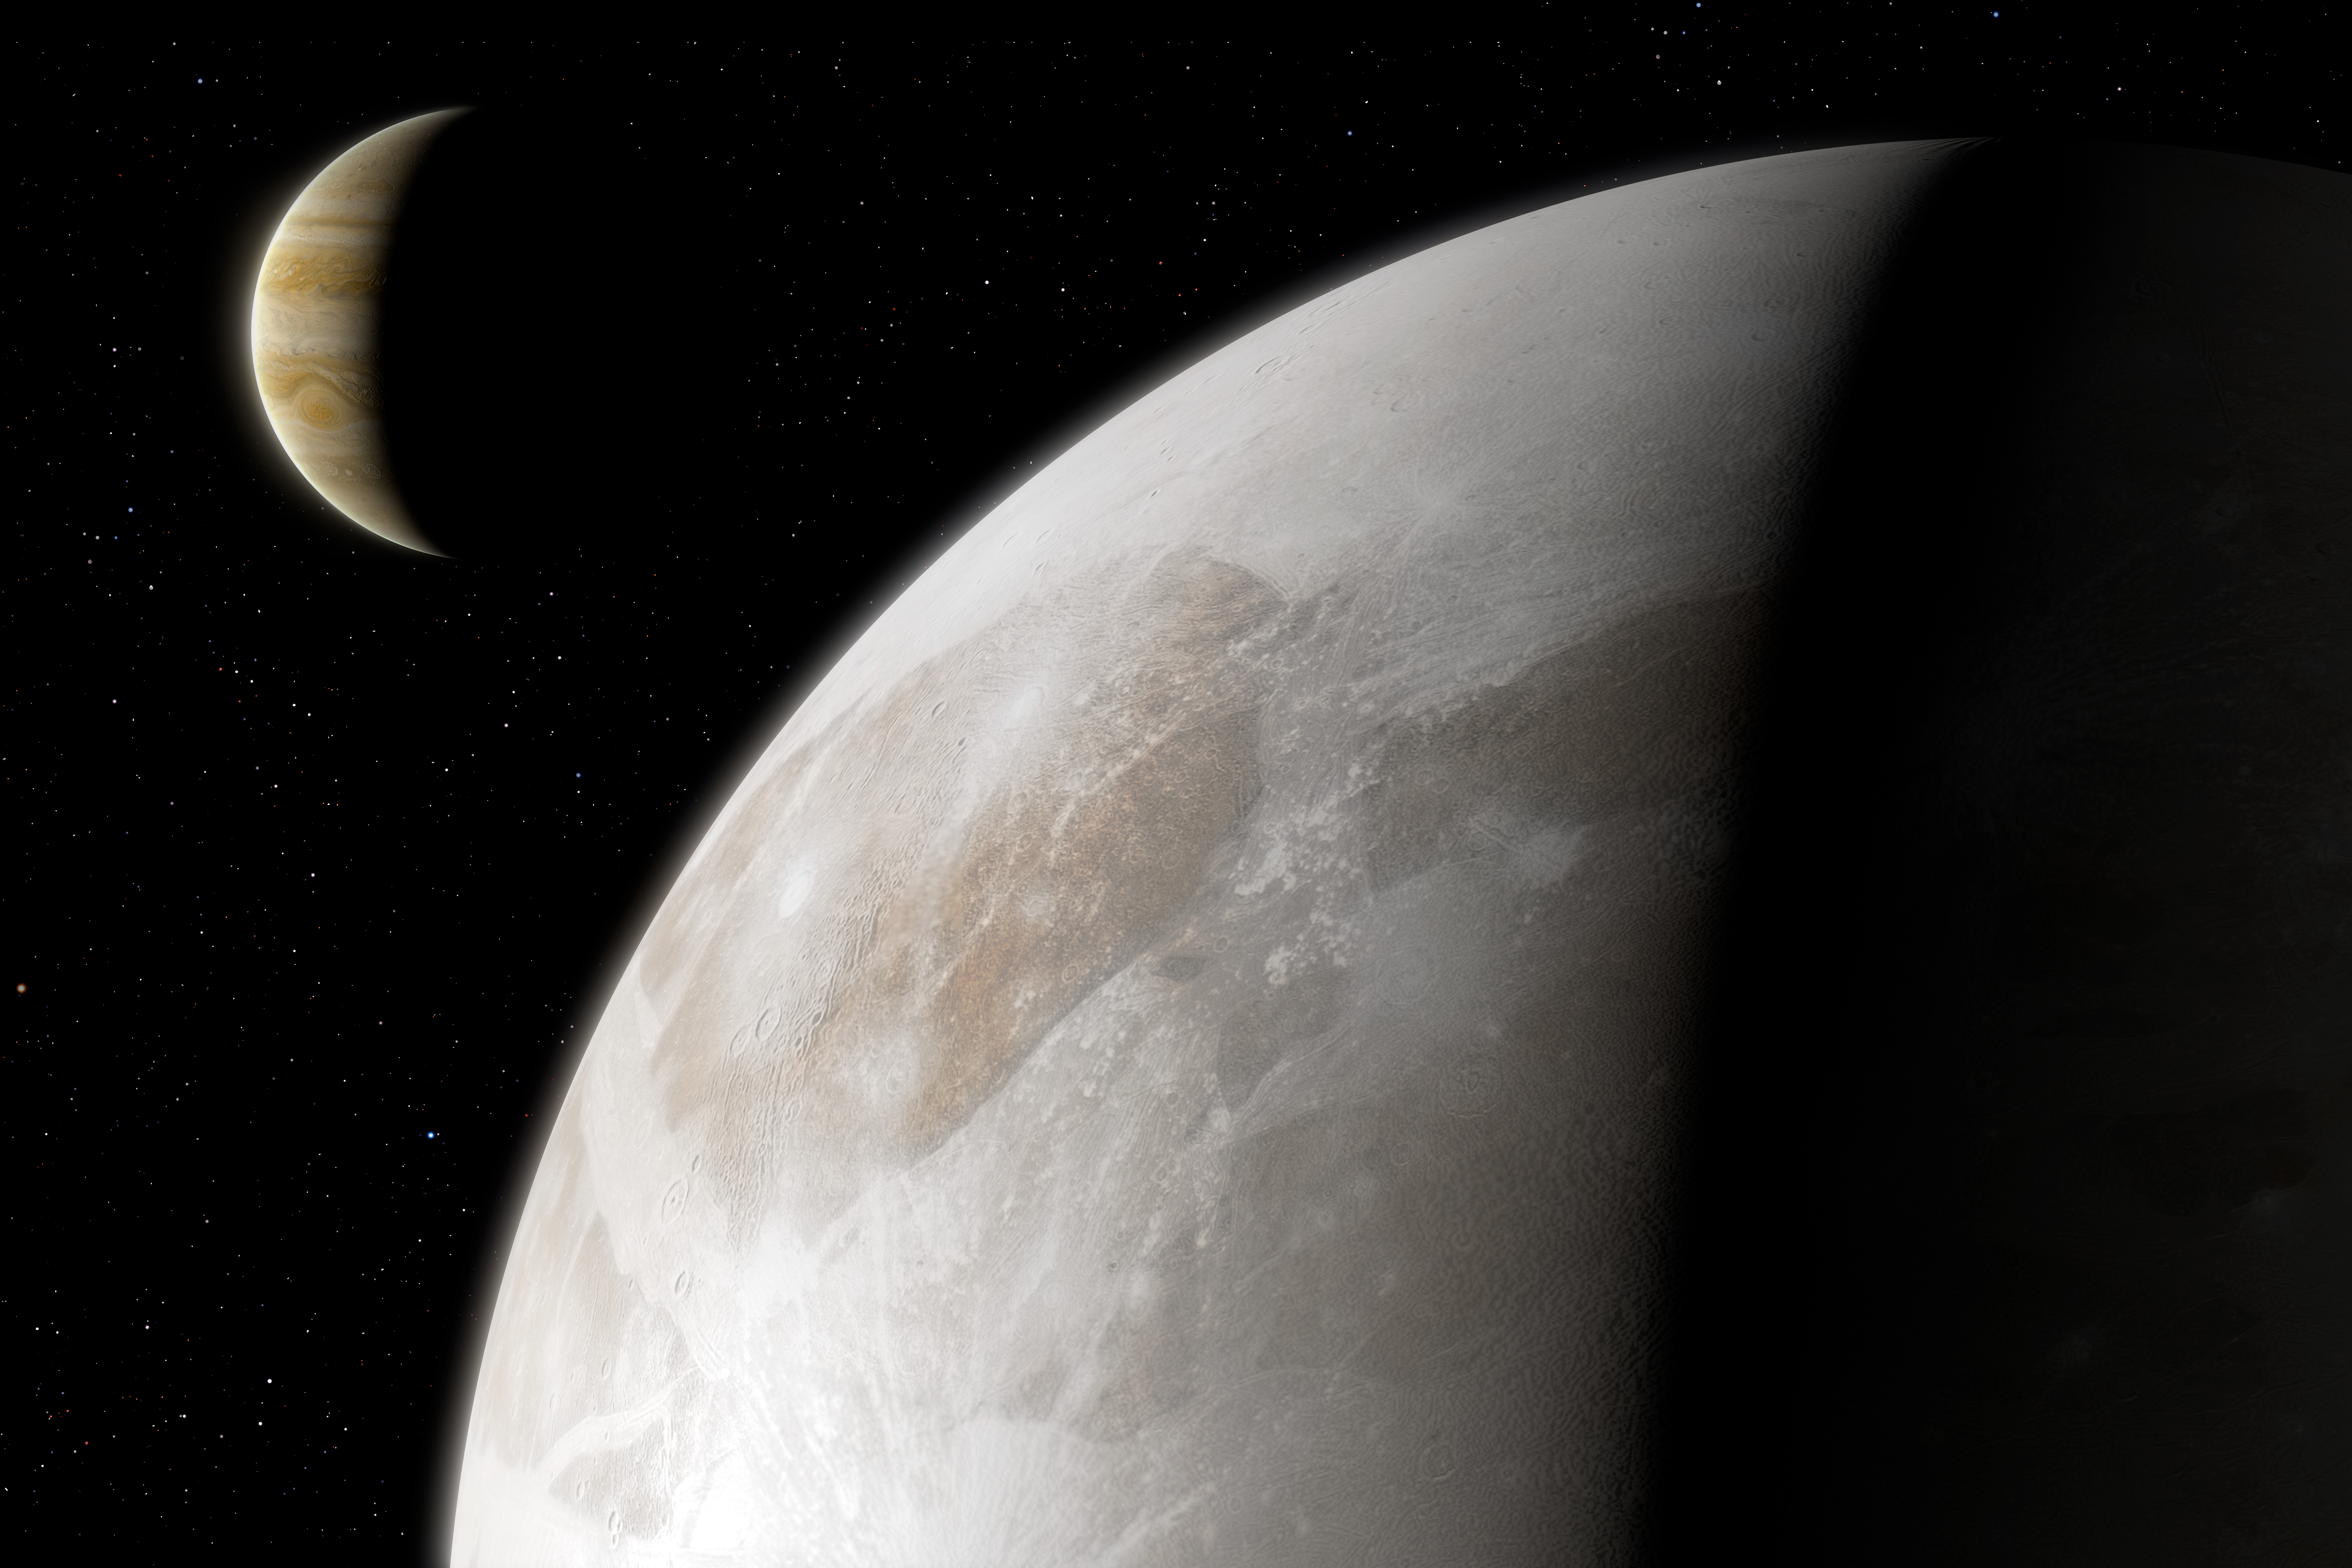

Artist’s Impression of Ganymede

This image presents an artist’s impression of Jupiter’s moon Ganymede.

Astronomers have used archival datasets from the NASA/ESA Hubble Space Telescope to reveal the first evidence for water vapour in the atmosphere of Jupiter’s moon Ganymede, the result of the thermal escape of water vapour from the moon’s icy surface.

Credit: ESA/Hubble, M. Garlick, A. Anpilogov